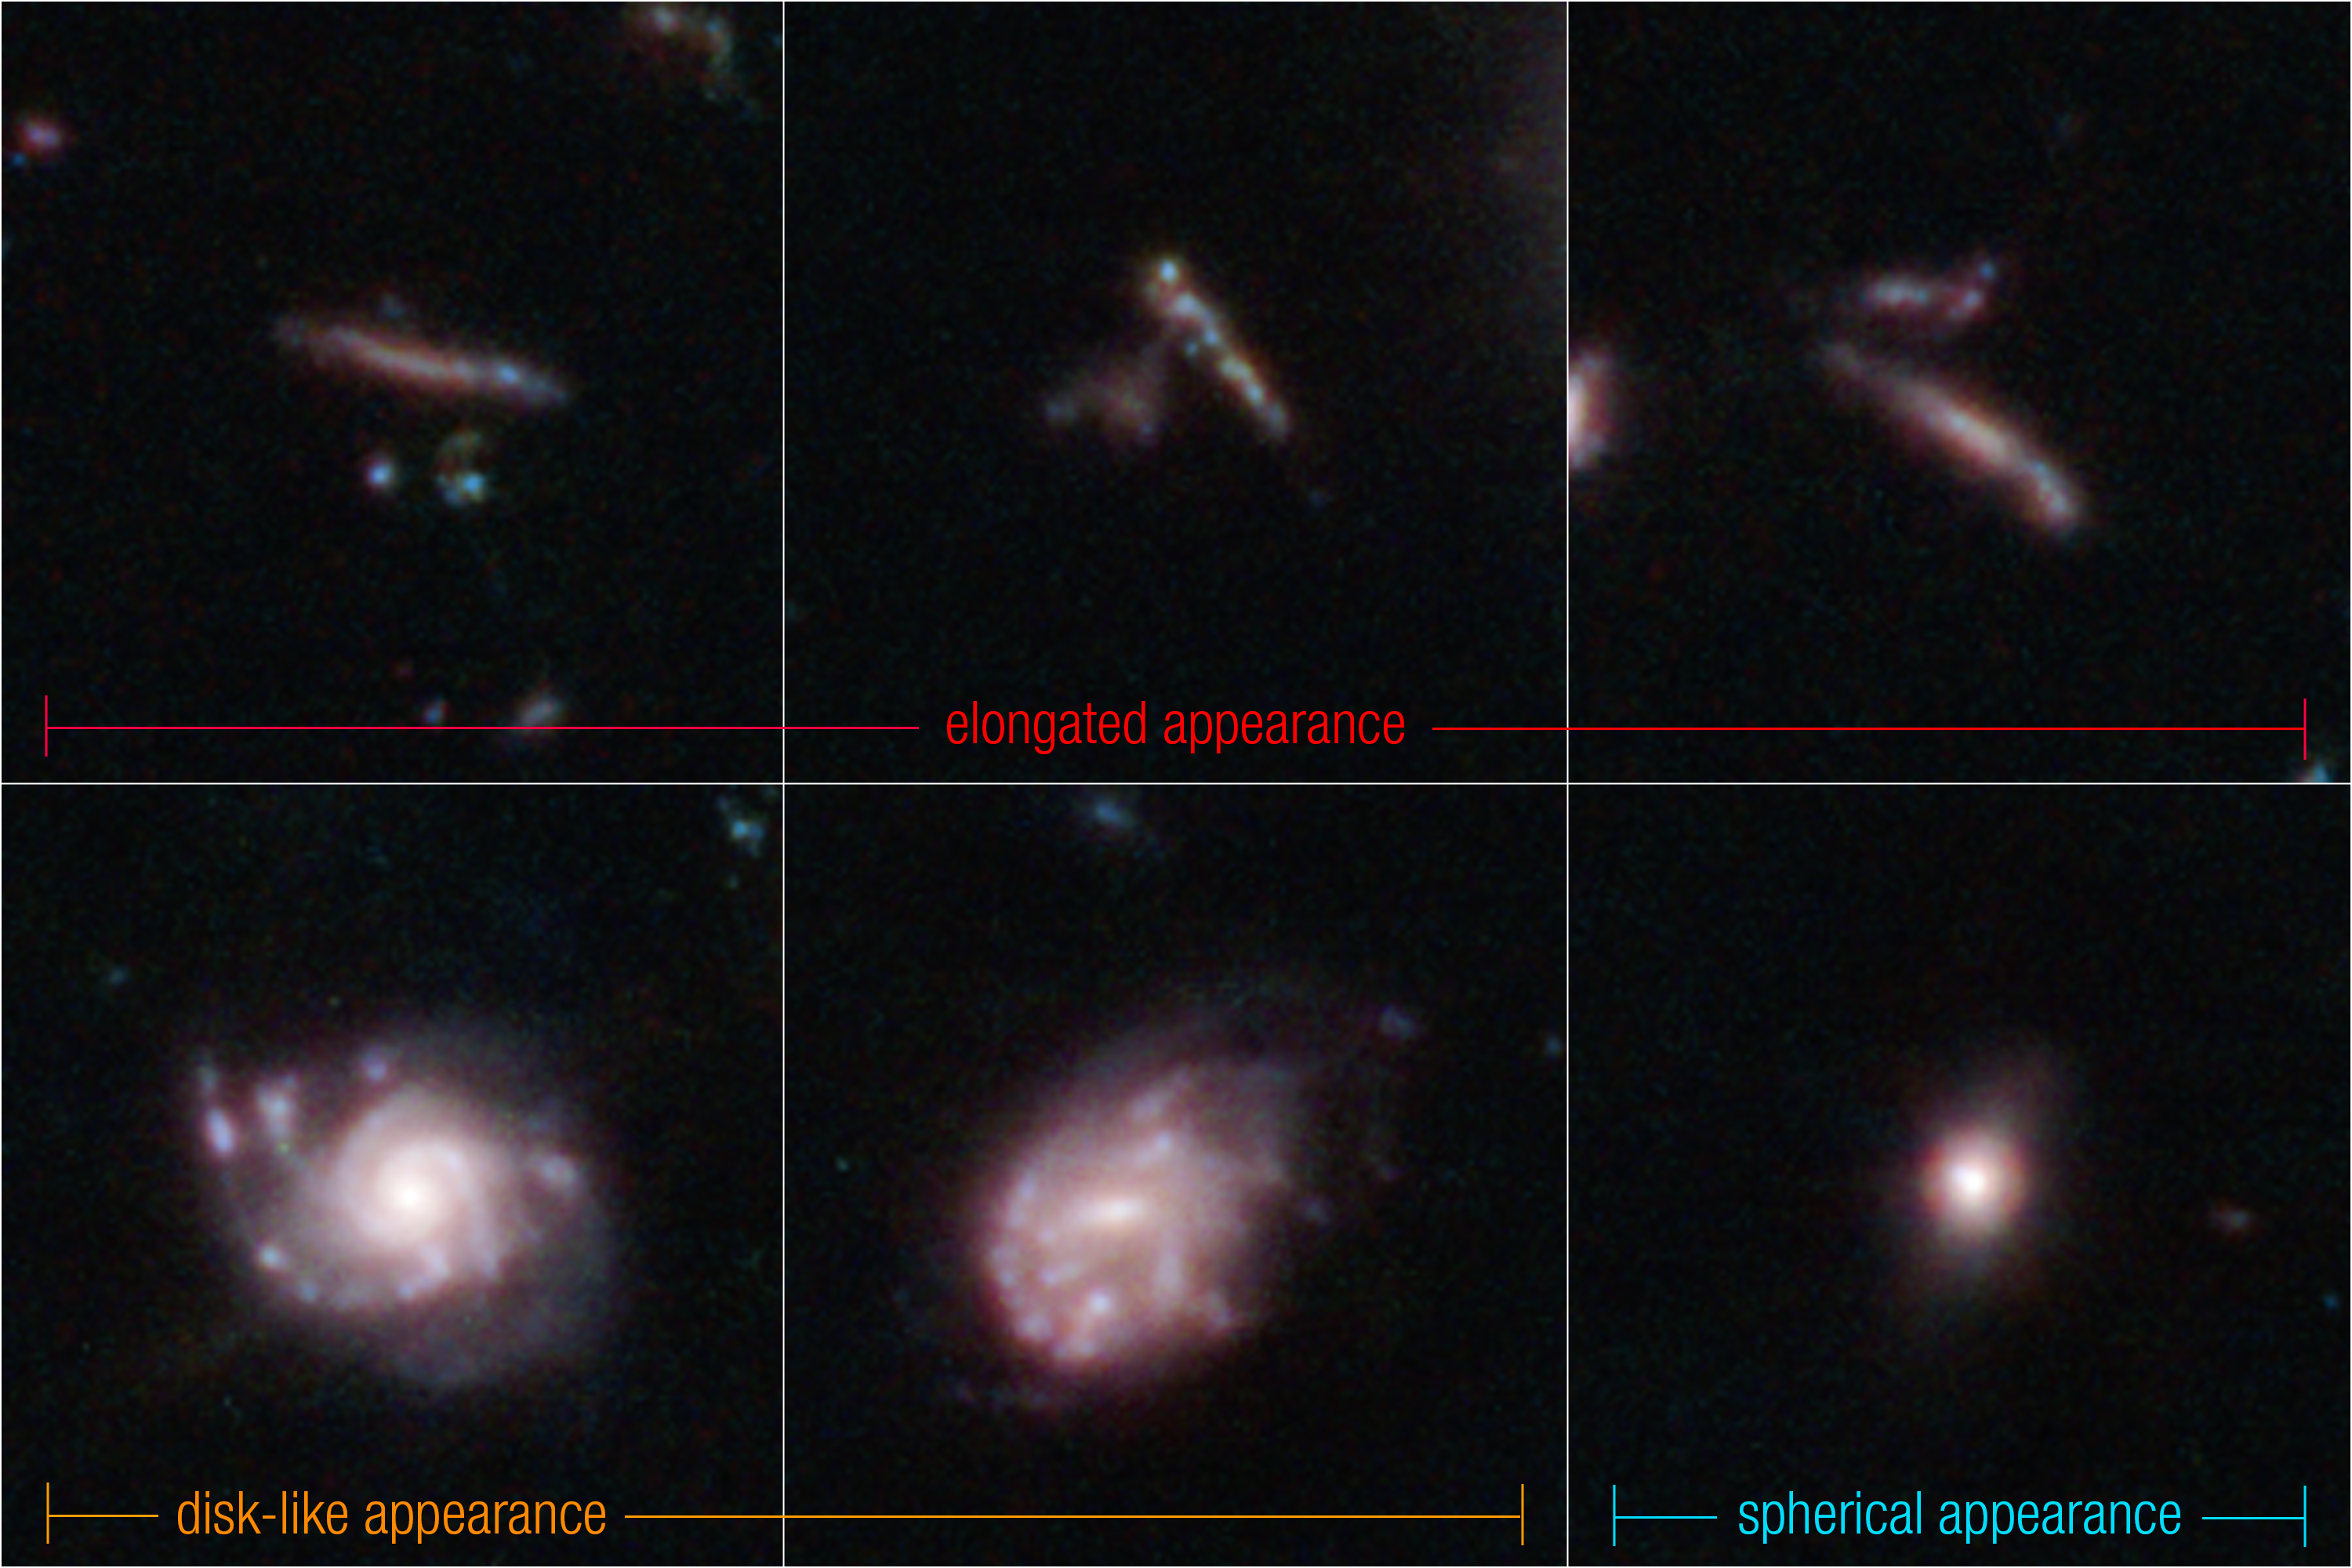

3D classifications for distant galaxies in Webb’s CEERS Survey (NIRCam image)

These are examples of distant galaxies captured by the NASA/ESA/CSA James Webb Space Telescope in its Cosmic Evolution Early Release Science (CEERS) Survey.

Recent research of the CEERS field showed that galaxies frequently appear flat and elongated, like pool noodles or surfboards (along the top row).

Thin, circular disk-like galaxies, which resemble frisbees, are the next major grouping (bottom left and centre).

Finally, galaxies that are shaped like spheres, or volleyballs, made up the smallest fraction of their detections (bottom right).

All of these galaxies are estimated to have existed when the Universe was 600 million to 6 billion years old.

These results are still considered preliminary, because the team sorted images of galaxies into broad classes based on similar characteristics. (They did not classify their individual appearances since that would require detailed information from data known as spectra.) Much more analysis of many more distant galaxies is needed to fully determine which galaxy shapes and compositions existed in the early Universe.

Credit: NASA, ESA, CSA, STScI, S. Finkelstein (UT Austin), M. Bagley (UT Austin), R. Larson (UT Austin)